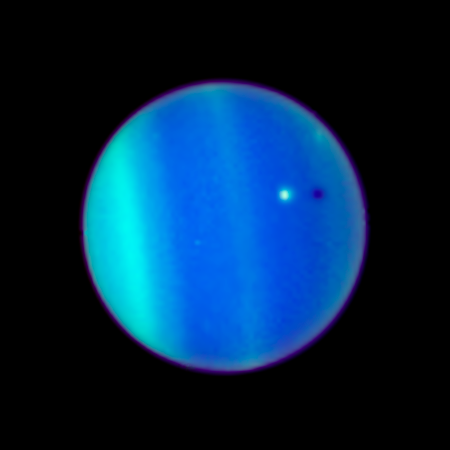

Uranus and Ariel - 2006 - Unannotated

This NASA Hubble Space Telescope image is a never-before-seen astronomical alignment of a moon traversing the face of Uranus, and its accompanying shadow. The white dot near the center of Uranus’ blue-green disk is the icy moon Ariel.

Credit: NASA, ESA, L. Sromovsky (University of Wisconsin, Madison), H. Hammel (Space Science Institute), and K. Rages (SETI)